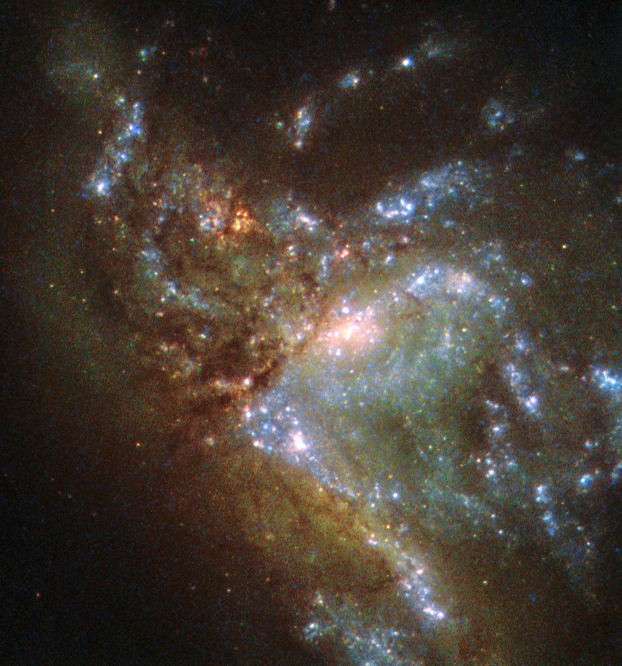

Two become one

This image, taken with the Wide Field Planetary Camera 2 on board the NASA/ESA Hubble Space Telescope, shows the galaxy NGC 6052, located around 230 million light-years away in the constellation of Hercules.

It would be reasonable to think of this as a single abnormal galaxy, and it was originally classified as such. However, it is in fact a “new” galaxy in the process of forming. Two separate galaxies have been gradually drawn together, attracted by gravity, and have collided. We now see them merging into a single structure.

As the merging process continues, individual stars are thrown out of their original orbits and placed onto entirely new paths, some very distant from the region of the collision itself. Since the stars produce the light we see, the “galaxy” now appears to have a highly chaotic shape. Eventually, this new galaxy will settle down into a stable shape, which may not resemble either of the two original galaxies.

Credit: ESA/Hubble & NASA, Acknowledgement: Judy Schmidt (Geckzilla)